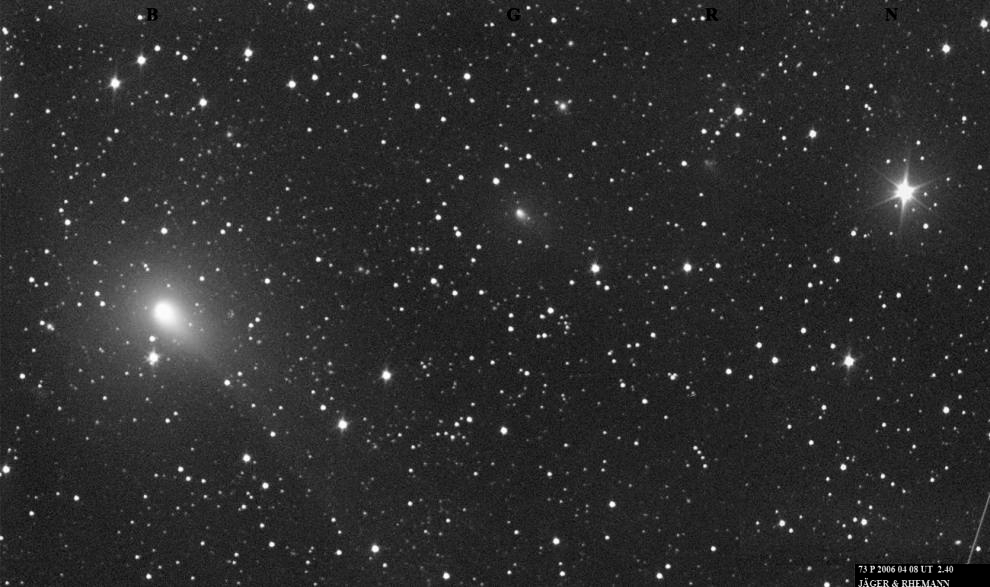

Comet 73P/Schwassmann-Wachmann 3 - Fragments B, G, R, N [ground-based]

Ground-based view of Comet 73P/Schwassmann-Wachmann 3 fragments B and G, R, and N on April 8, 2006 made with a 10"/380mm Schmidt Camera. The image is 80 arcminutes wide.

Credit: M. Jäger and G. Rhemann